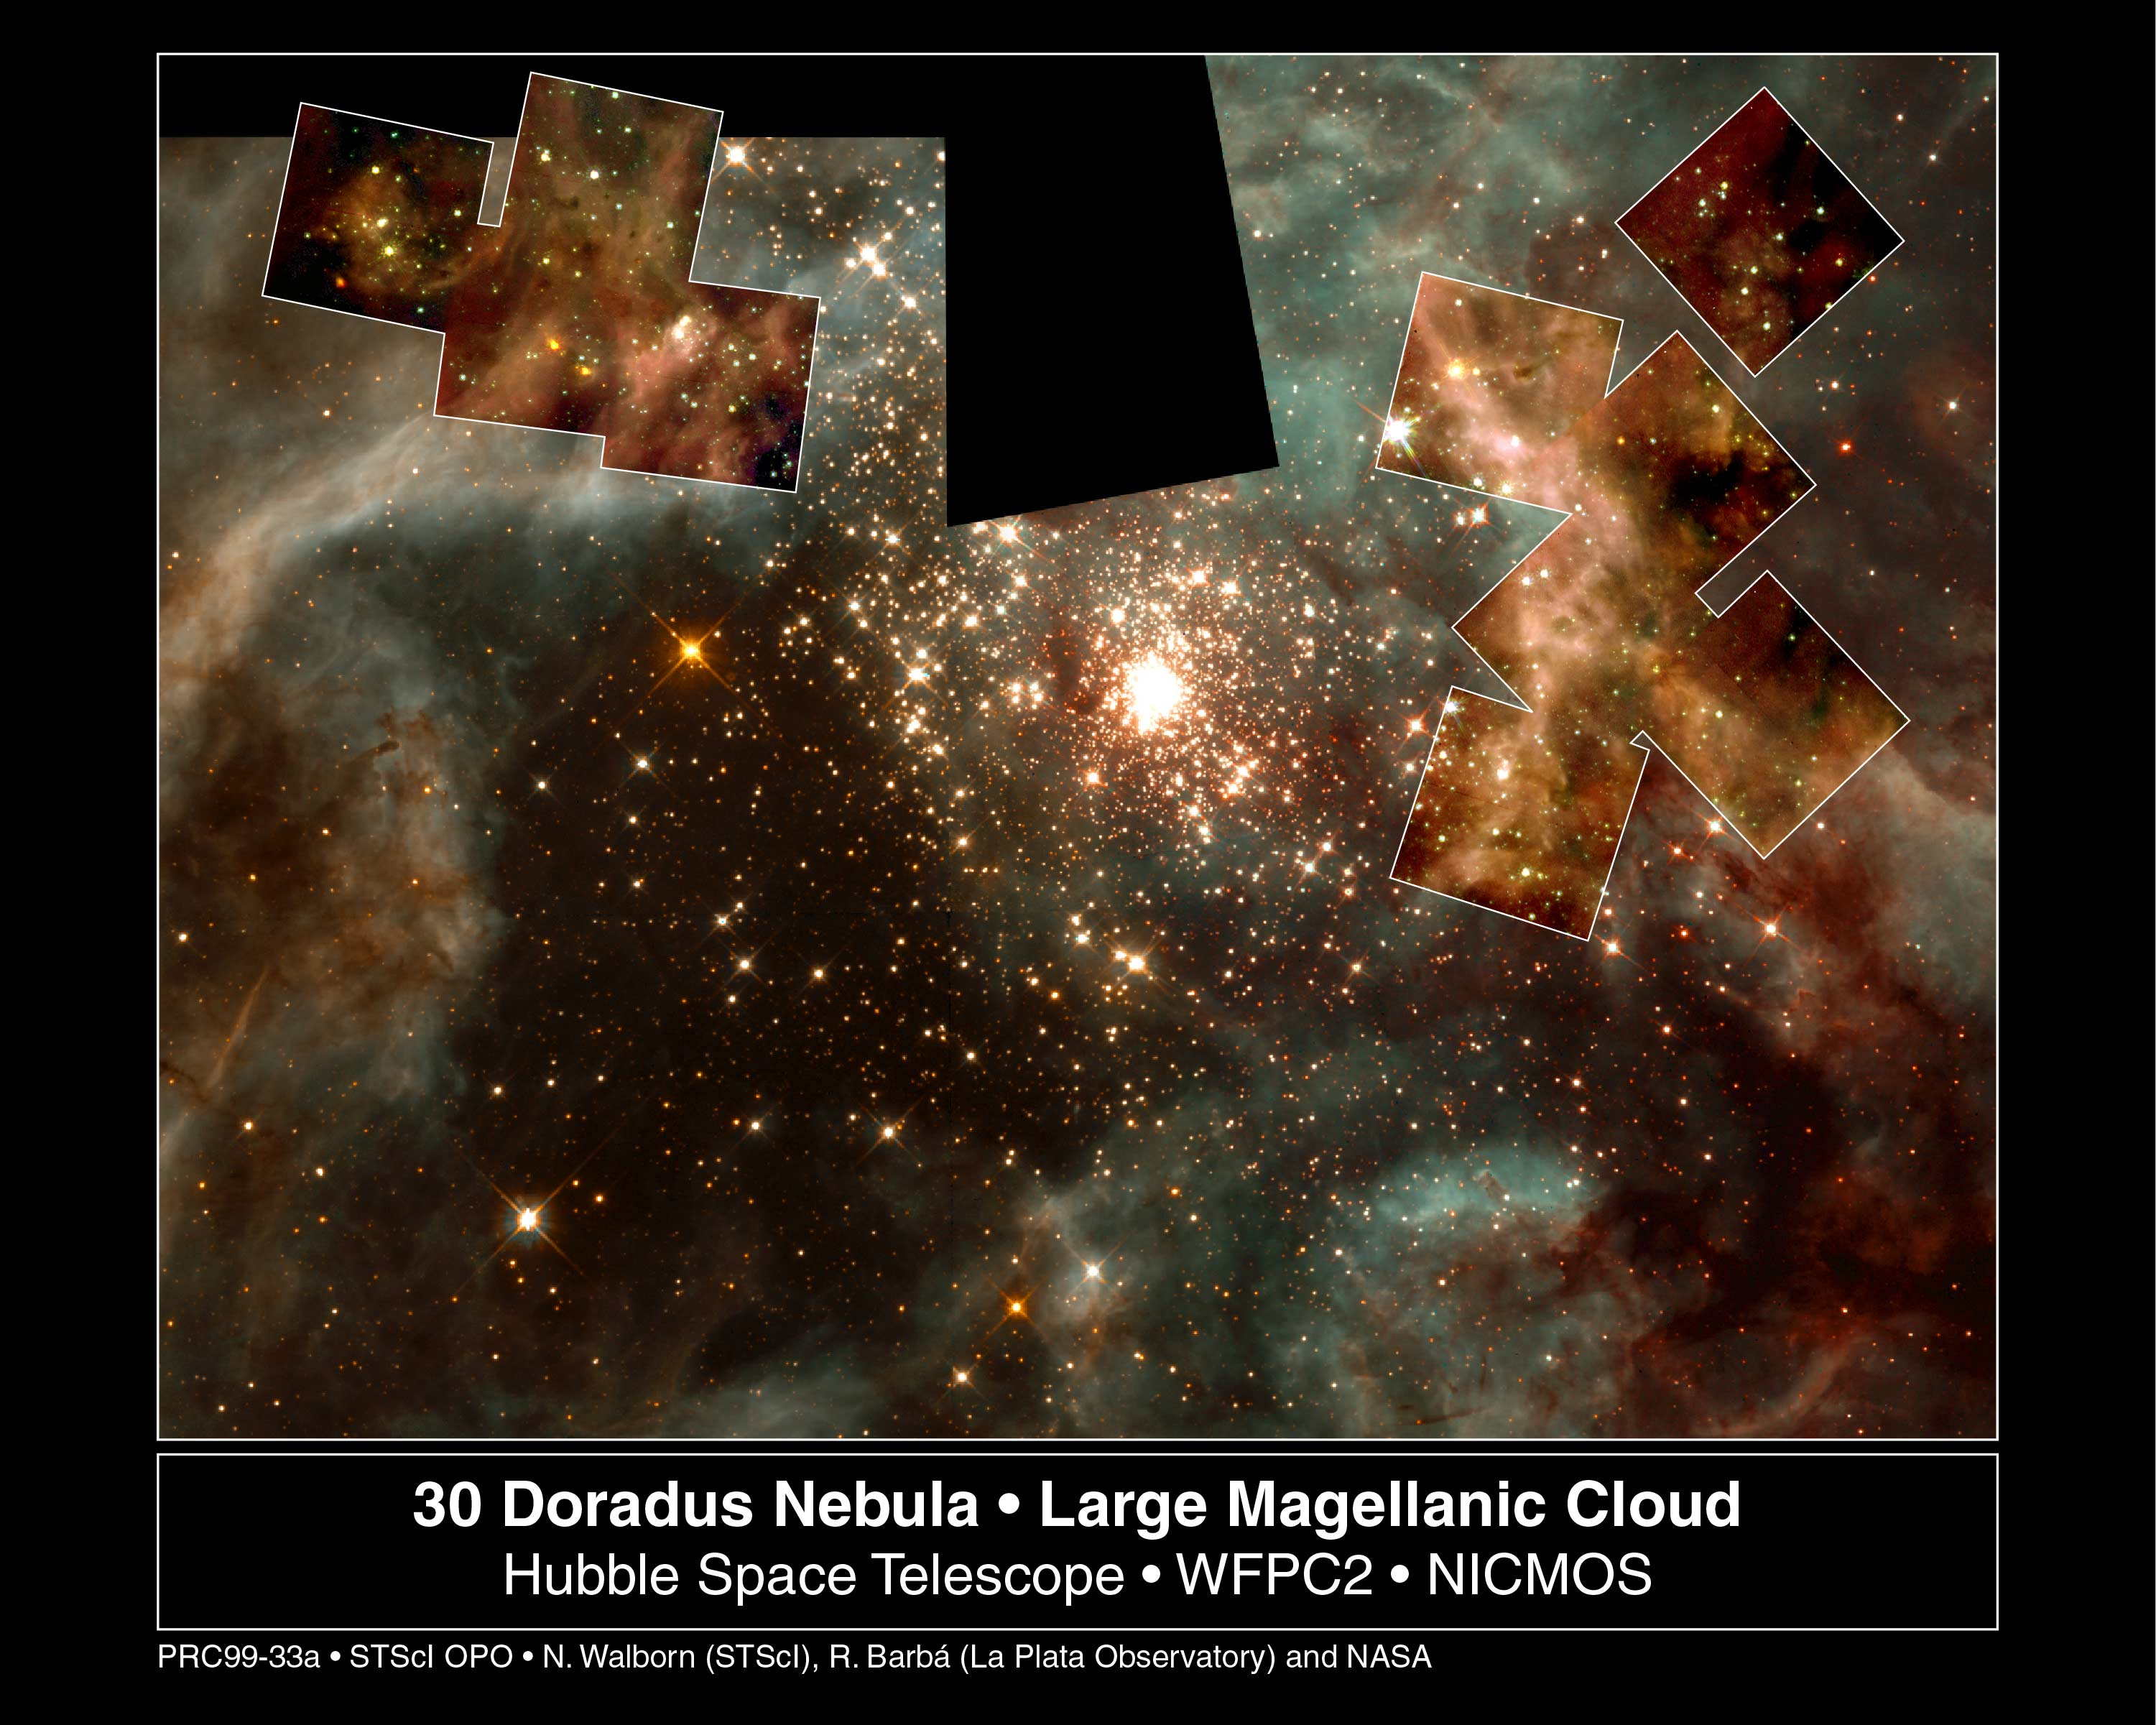

A grand view of the birth of 'hefty' stars - 30 Doradus Nebula montage

This picture, taken in visible light with the Hubble Space Telescope's Wide Field and Planetary Camera 2 (WFPC2), represents a sweeping view of the 30 Doradus Nebula. But Hubble's infrared camera - the Near Infrared Camera and Multi-Object Spectrometer (NICMOS) - has probed deeper into smaller regions of this nebula to unveil the stormy birth of massive stars. The montages of images in the upper left and upper right represent this deeper view. Each square in the montages is 15.5 light-years (19 arcseconds) across.

Credit: NASA/ESA/Nolan Walborn ( Space Telescope Science Institute, Baltimore, Md.) and Rodolfo Barba (La Plata Observatory, La Plata, Argentina), NASA/ESA/John Trauger (Jet Propulsion Laboratory, Pasadena, Calif.) and James Westphal (California Institute of Technology, Pasadena, Calif.)